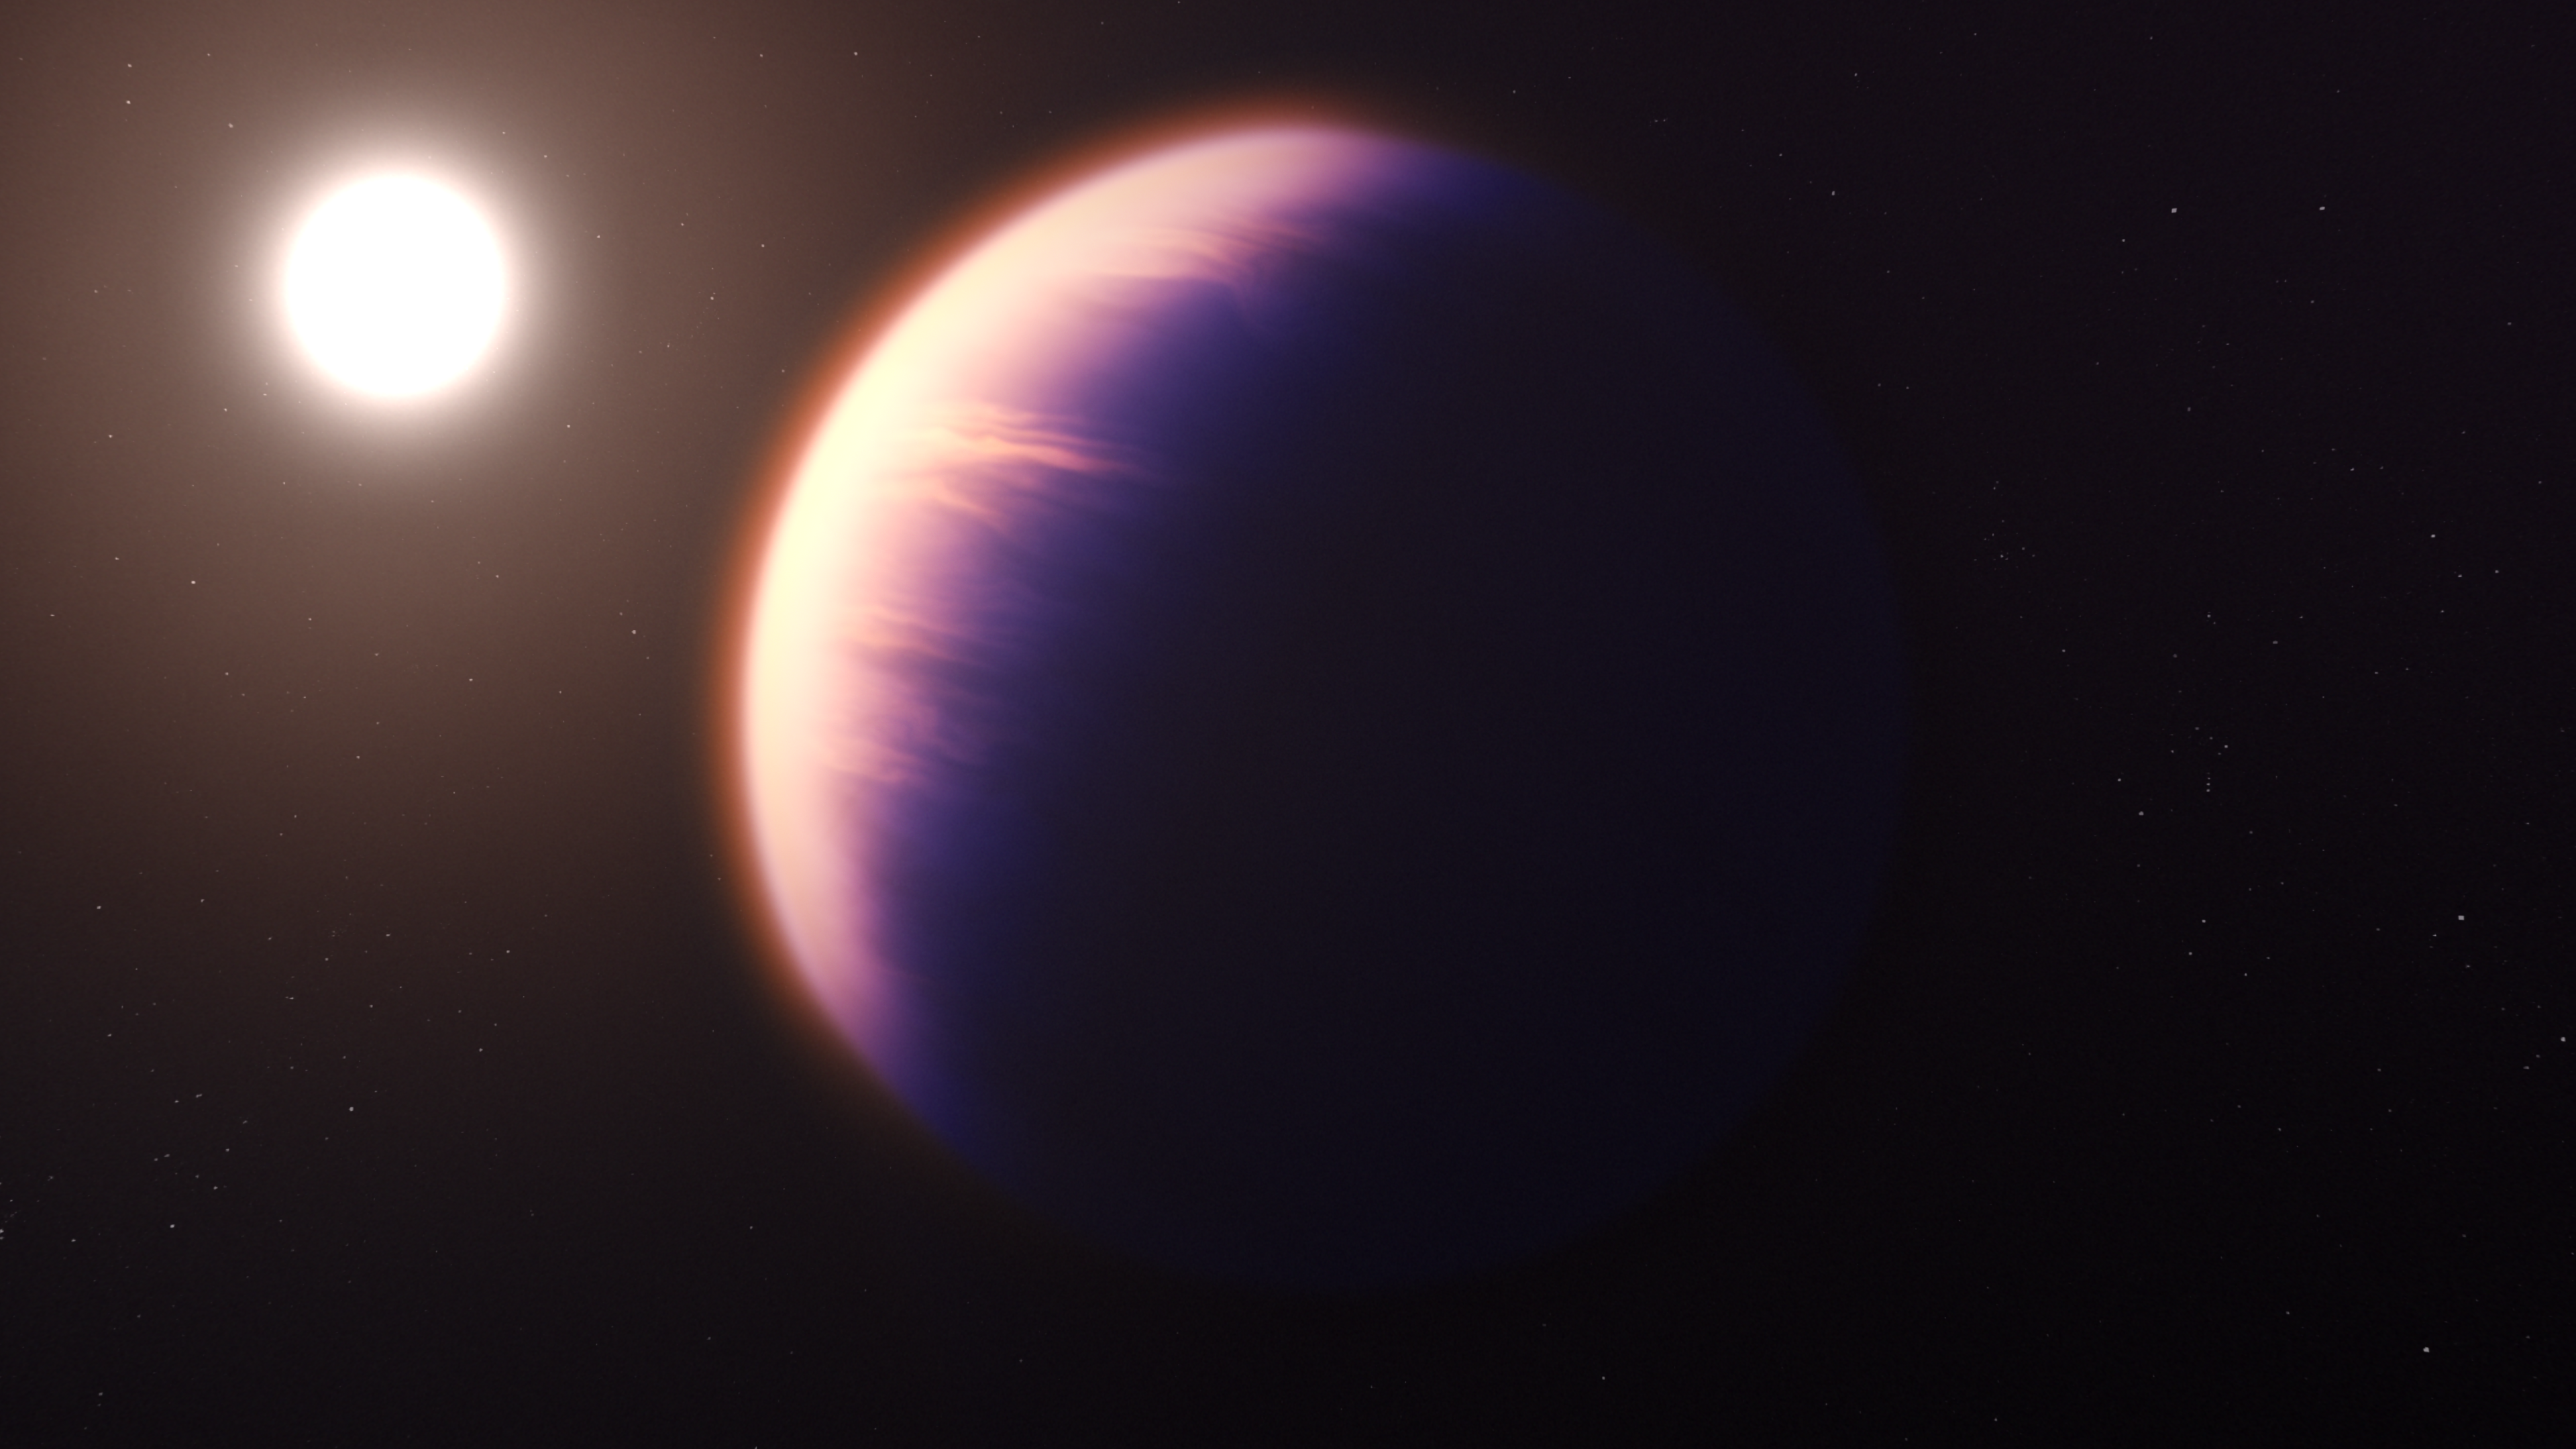

Illustration (Artist’s Impression) of WASP-39 b and Its Star

This is an illustration (artist’s impression) showing what the exoplanet WASP-39 b could look like, based on current understanding of the planet.

WASP-39 b is a hot, puffy gas giant planet with a mass 0.28 times that of Jupiter (0.94 times that of Saturn) and a diameter 1.3 times that of Jupiter, orbiting just 0.0486 astronomical units (4 520 000 miles) from its host star. The star, WASP-39, is fractionally smaller and less massive than the Sun. Because it is so close to its star, WASP-39 b is very hot and is likely to be tidally locked, meaning that one side faces the star at all times.

Data collected by Webb’s Near-Infrared Spectrograph (NIRSpec) show unambiguous evidence for carbon dioxide in the atmosphere, while previous observations from Hubble, Spitzer, and other telescopes indicate the presence of water vapour, sodium, and potassium, as well. The planet probably has clouds and some form of weather, but may not have atmospheric bands like those of Jupiter and Saturn.

This illustration is based on indirect transit observations from Webb as well as other space and ground-based telescopes. Webb has not captured a direct image of this planet.

NIRSpec was built for the European Space Agency (ESA) by a consortium of European companies led by Airbus Defence and Space (ADS) with NASA’s Goddard Space Flight Centre providing its detector and micro-shutter subsystems.

Credit: NASA, ESA, CSA, and J. Olmsted (STScI)